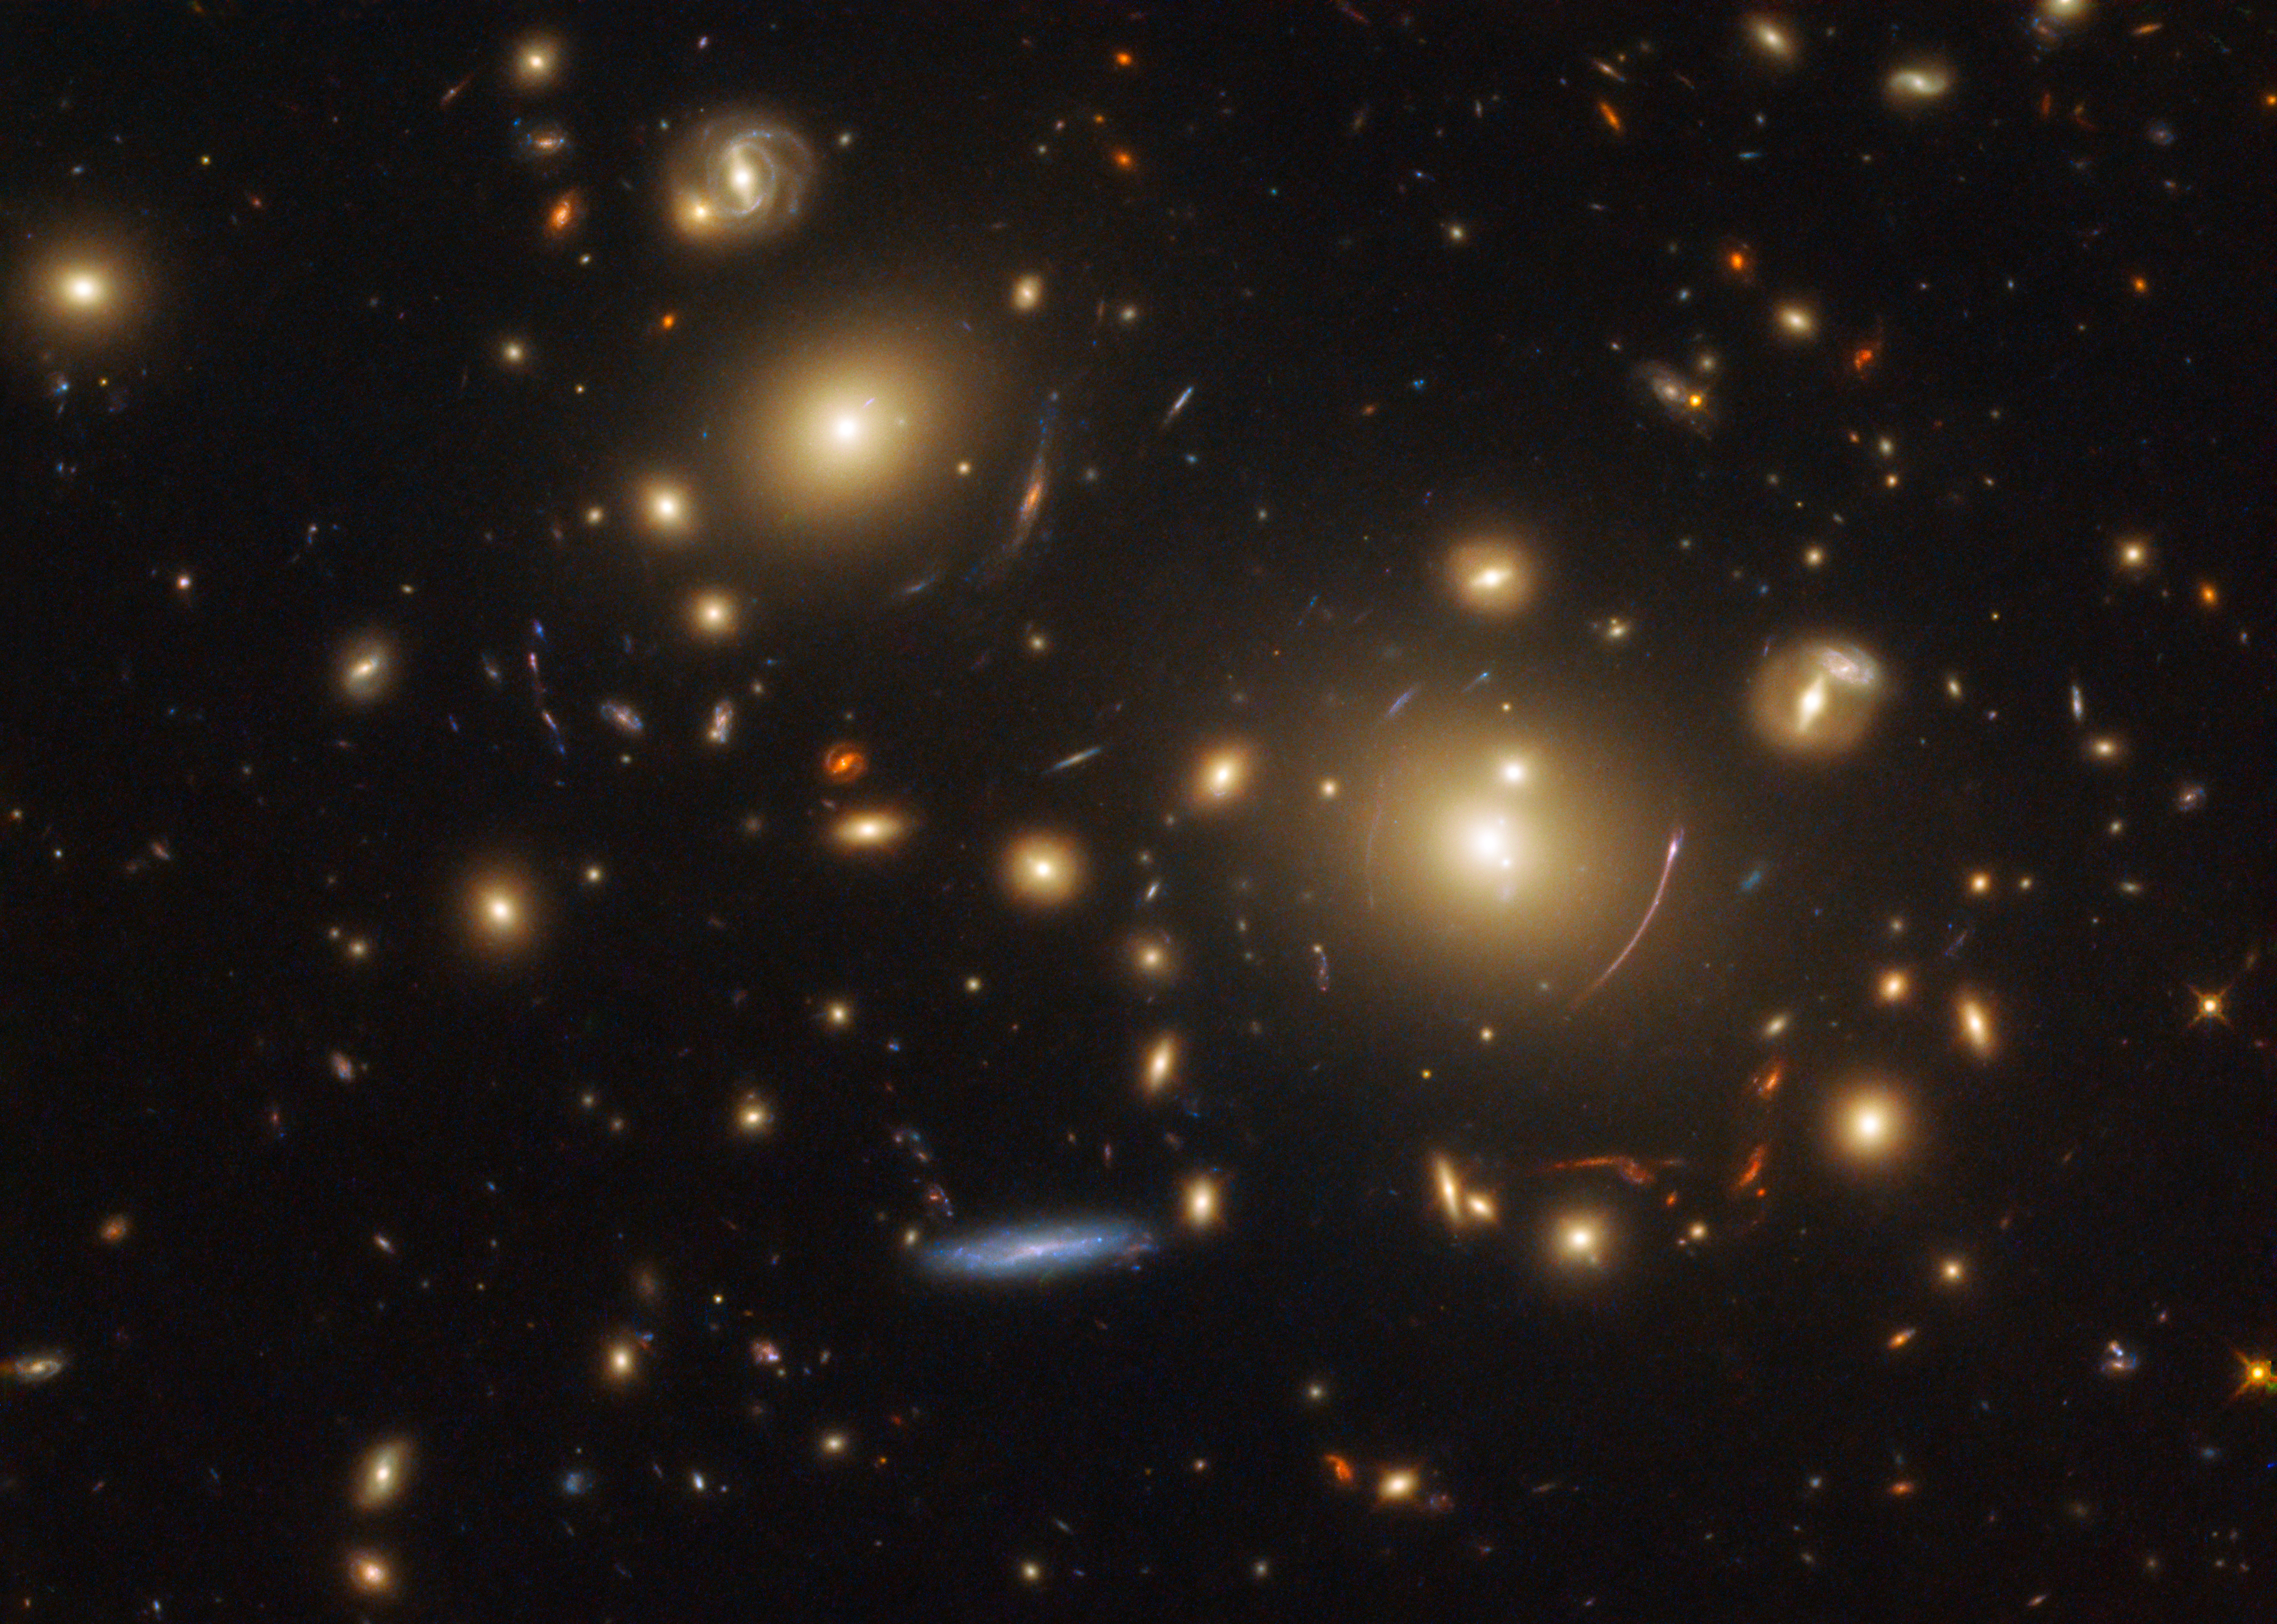

Peering into the past

This picture showcases a gravitational lensing system called SDSS J0928+2031. Quite a few images of this type of lensing have been featured as Pictures of the Week in past months, as NASA/ESA Hubble Space Telescope data is currently being used to research how stars form and evolve in distant galaxies.

Gravitational lensing can help astronomers study objects that would otherwise be too faint or appear too small for us to view. When a massive object — such as a massive cluster of galaxies, as seen here — distorts space with its immense gravitational field, it causes light from more distant galaxies to travel along altered and warped paths. It also amplifies the light, making it possible for us to observe and study its source.

In this image, we see two dominant elliptical galaxies near the centre of the image. The gravity from the galaxy cluster that is the home of these galaxies is acting as the aforementioned gravitational lens, allowing us to view the more distant galaxies sitting behind them. We see the effects of this lensing as narrow, curved streaks of light surrounding both of the large galaxies.

This image was observed by Hubble as part of the Sloan Giant Arcs Survey programme.

Credit: ESA/Hubble & NASA, M. Gladders et al. Acknowledgement: Judy Schmidt